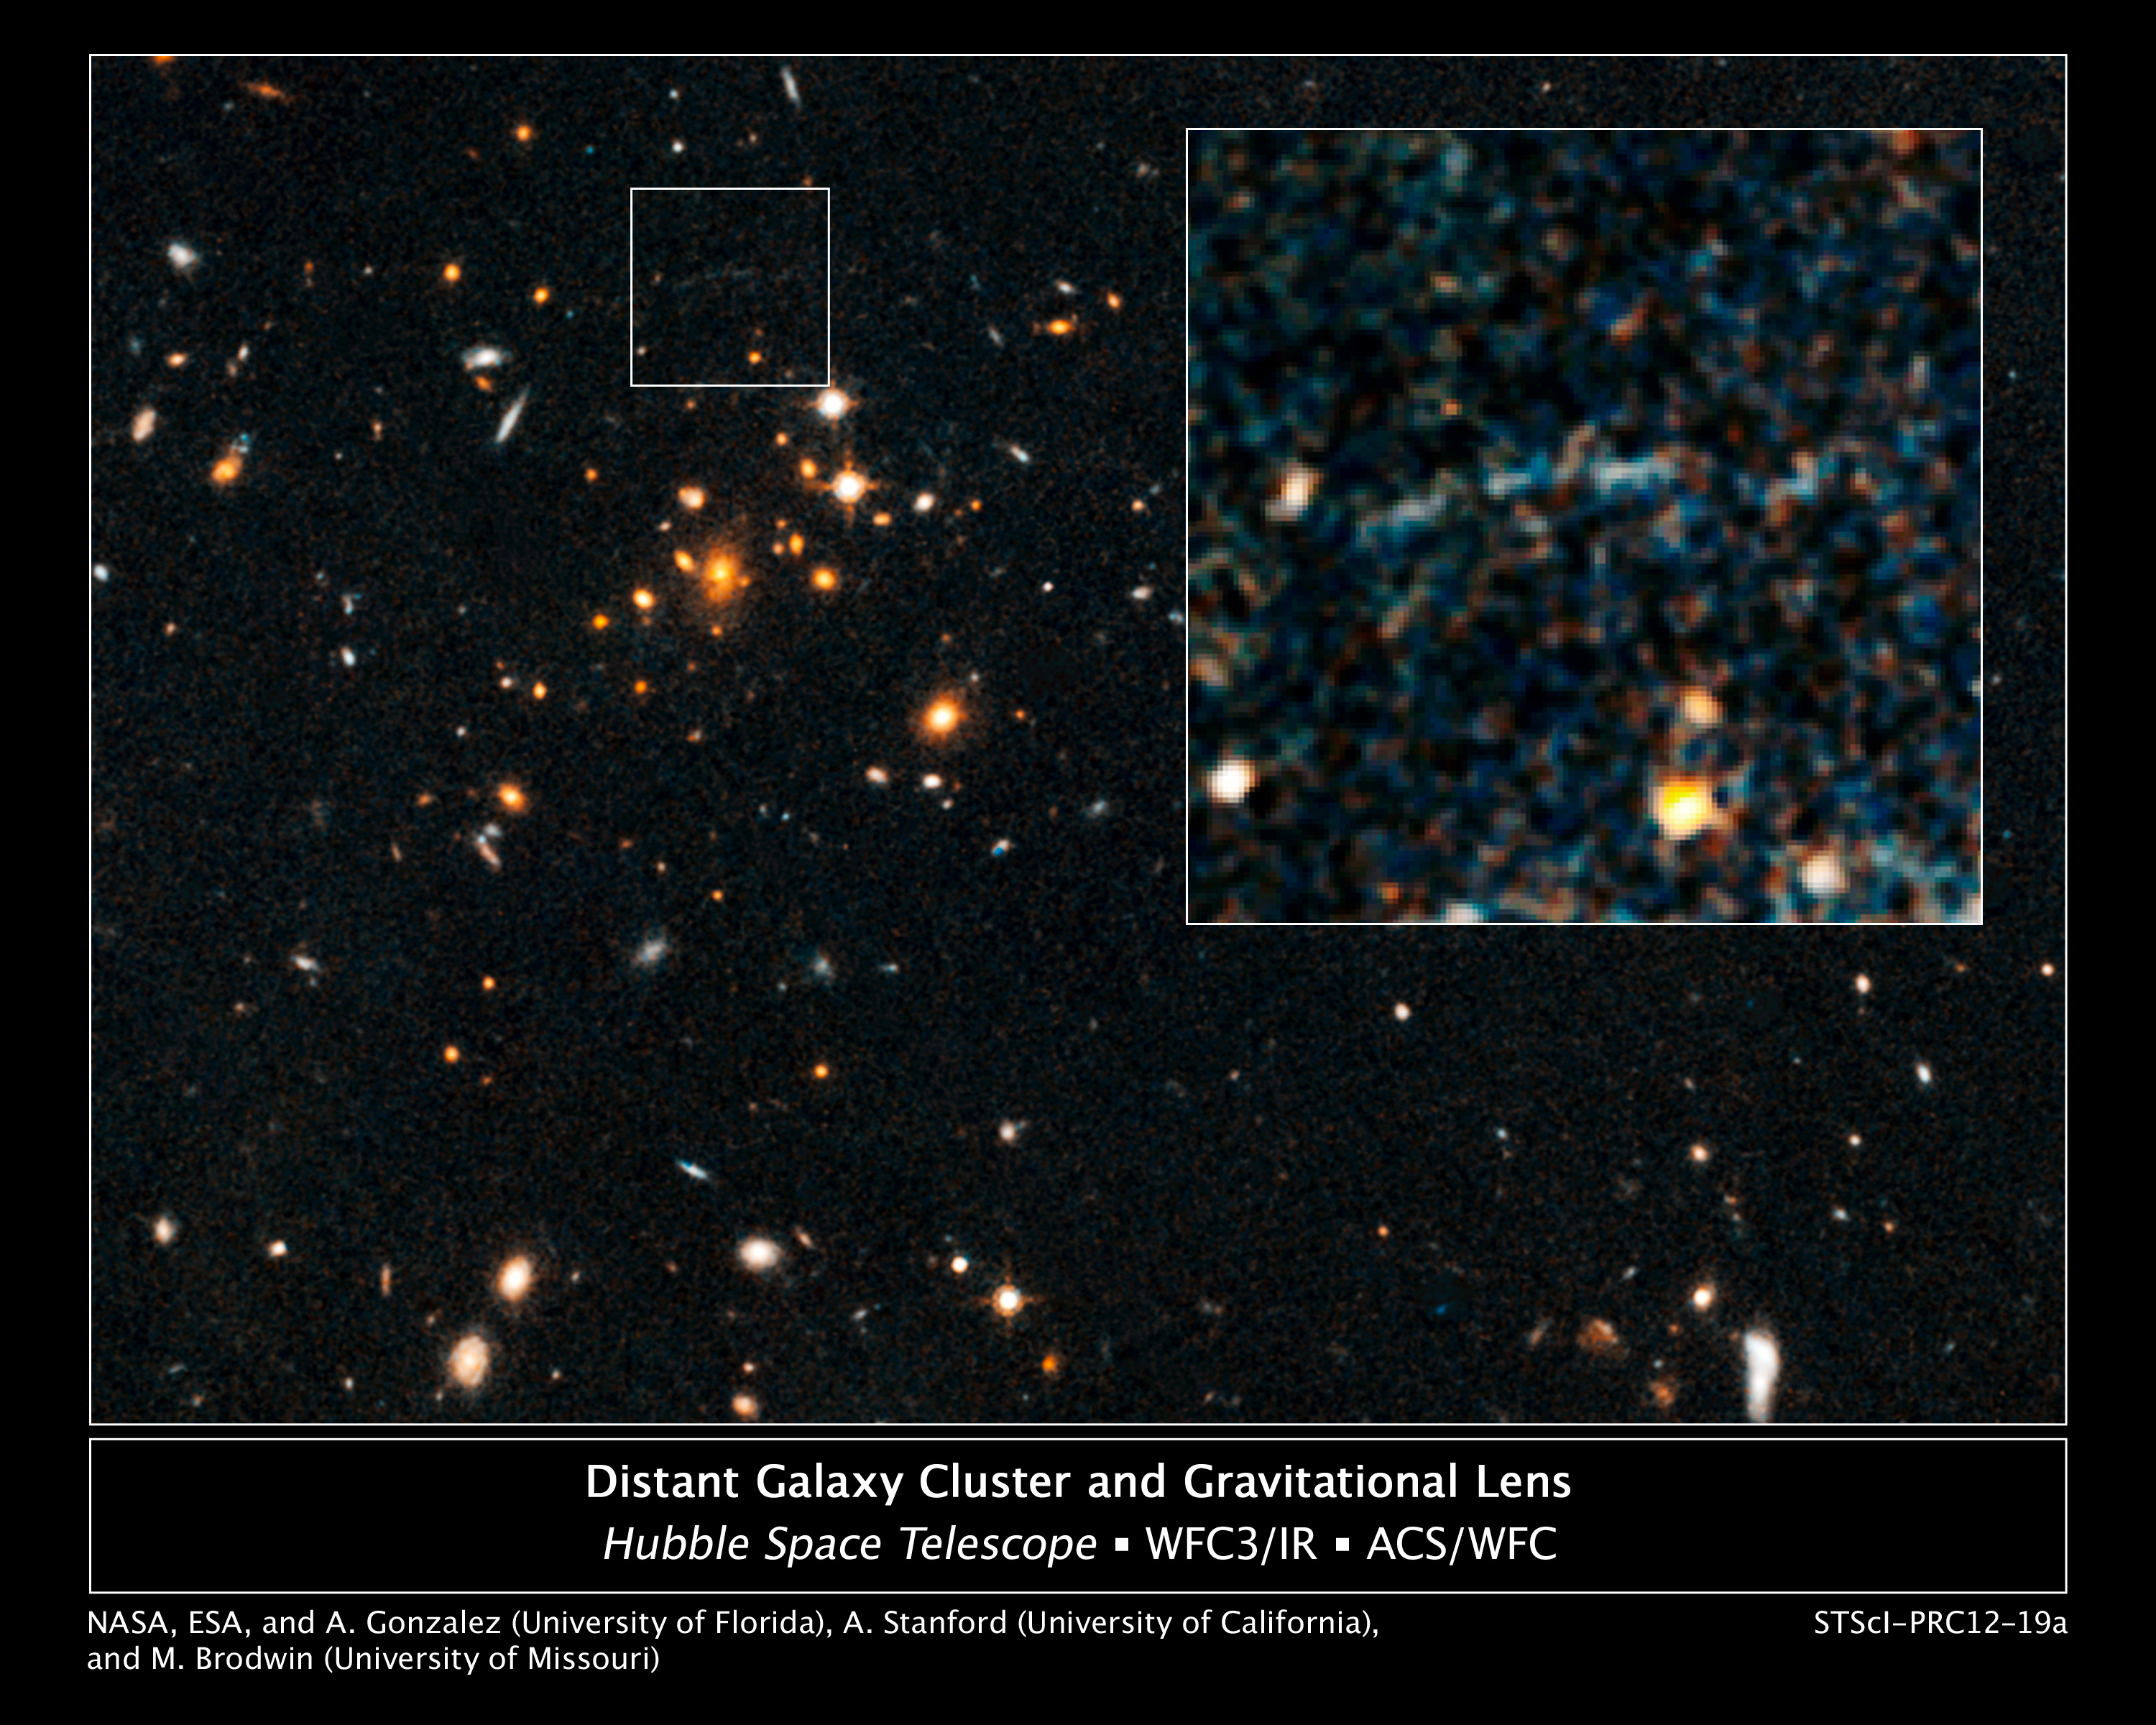

Galaxy cluster IDCS J1426.5+3508 and giant arc

These images, taken by the NASA/ESA Hubble Space Telescope, show an arc of blue light behind an extremely massive cluster of galaxies residing 10 billion light-years away.

The giant arc is the stretched shape of a more distant star-forming galaxy whose light is distorted by the monster cluster's powerful gravity, an effect called gravitational lensing. The "lensed" galaxy existed 10 billion to 13 billion years ago.

The arc, located within the small box, is barely visible in the Hubble image of the cluster, named IDCS J1426.5+3508. A close-up image of the arc is shown in the inset. The images were taken by Hubble's Advanced Camera for Surveys and Wide Field Camera 3 in 2010.

The cluster is the most massive found at that epoch, weighing as much as 500 trillion suns. The assemblage is 5 to 10 times larger than other clusters found at such an early time in the Universe's history. This unique system constitutes the most distant cluster known to "host" a giant gravitationally lensed arc.

Credit: NASA, ESA/Hubble, and A. Gonzalez (University of Florida, Gainesville, USA), A. Stanford (University of California, Davis and Lawrence Livermore National Laboratory, USA) and M. Brodwin (University of Missouri-Kansas City and Harvard-Smithsonian Center for Astrophysics, USA)